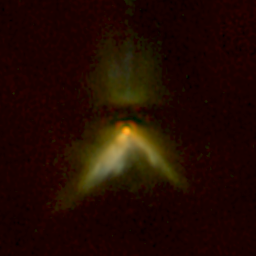

NICMOS Peers Through Dust to Reveal Young Steller Disks. A View of DG Tau B

An excellent example of the complementary nature of Hubble's instruments may be found by comparing the infrared NICMOS image of DG Tau B to the visible-light Wide Field and Planetary Camera 2(WFPC2) image of the same object. WFPC2 highlights the jet emerging from the system, while NICMOS penetrates some of the dust near the star to more clearly outline the 50 billion-mile-long dust lane (the horizontal dark band, which indicates the presence of a large disk forming around the infant star). The young star itself appears as the bright red spot at the corner of the V-shaped nebula.

Credit: D. Padgett (IPAC/Caltech), W. Brandner (IPAC), K. Stapelfeldt (JPL) and NASA/ESA